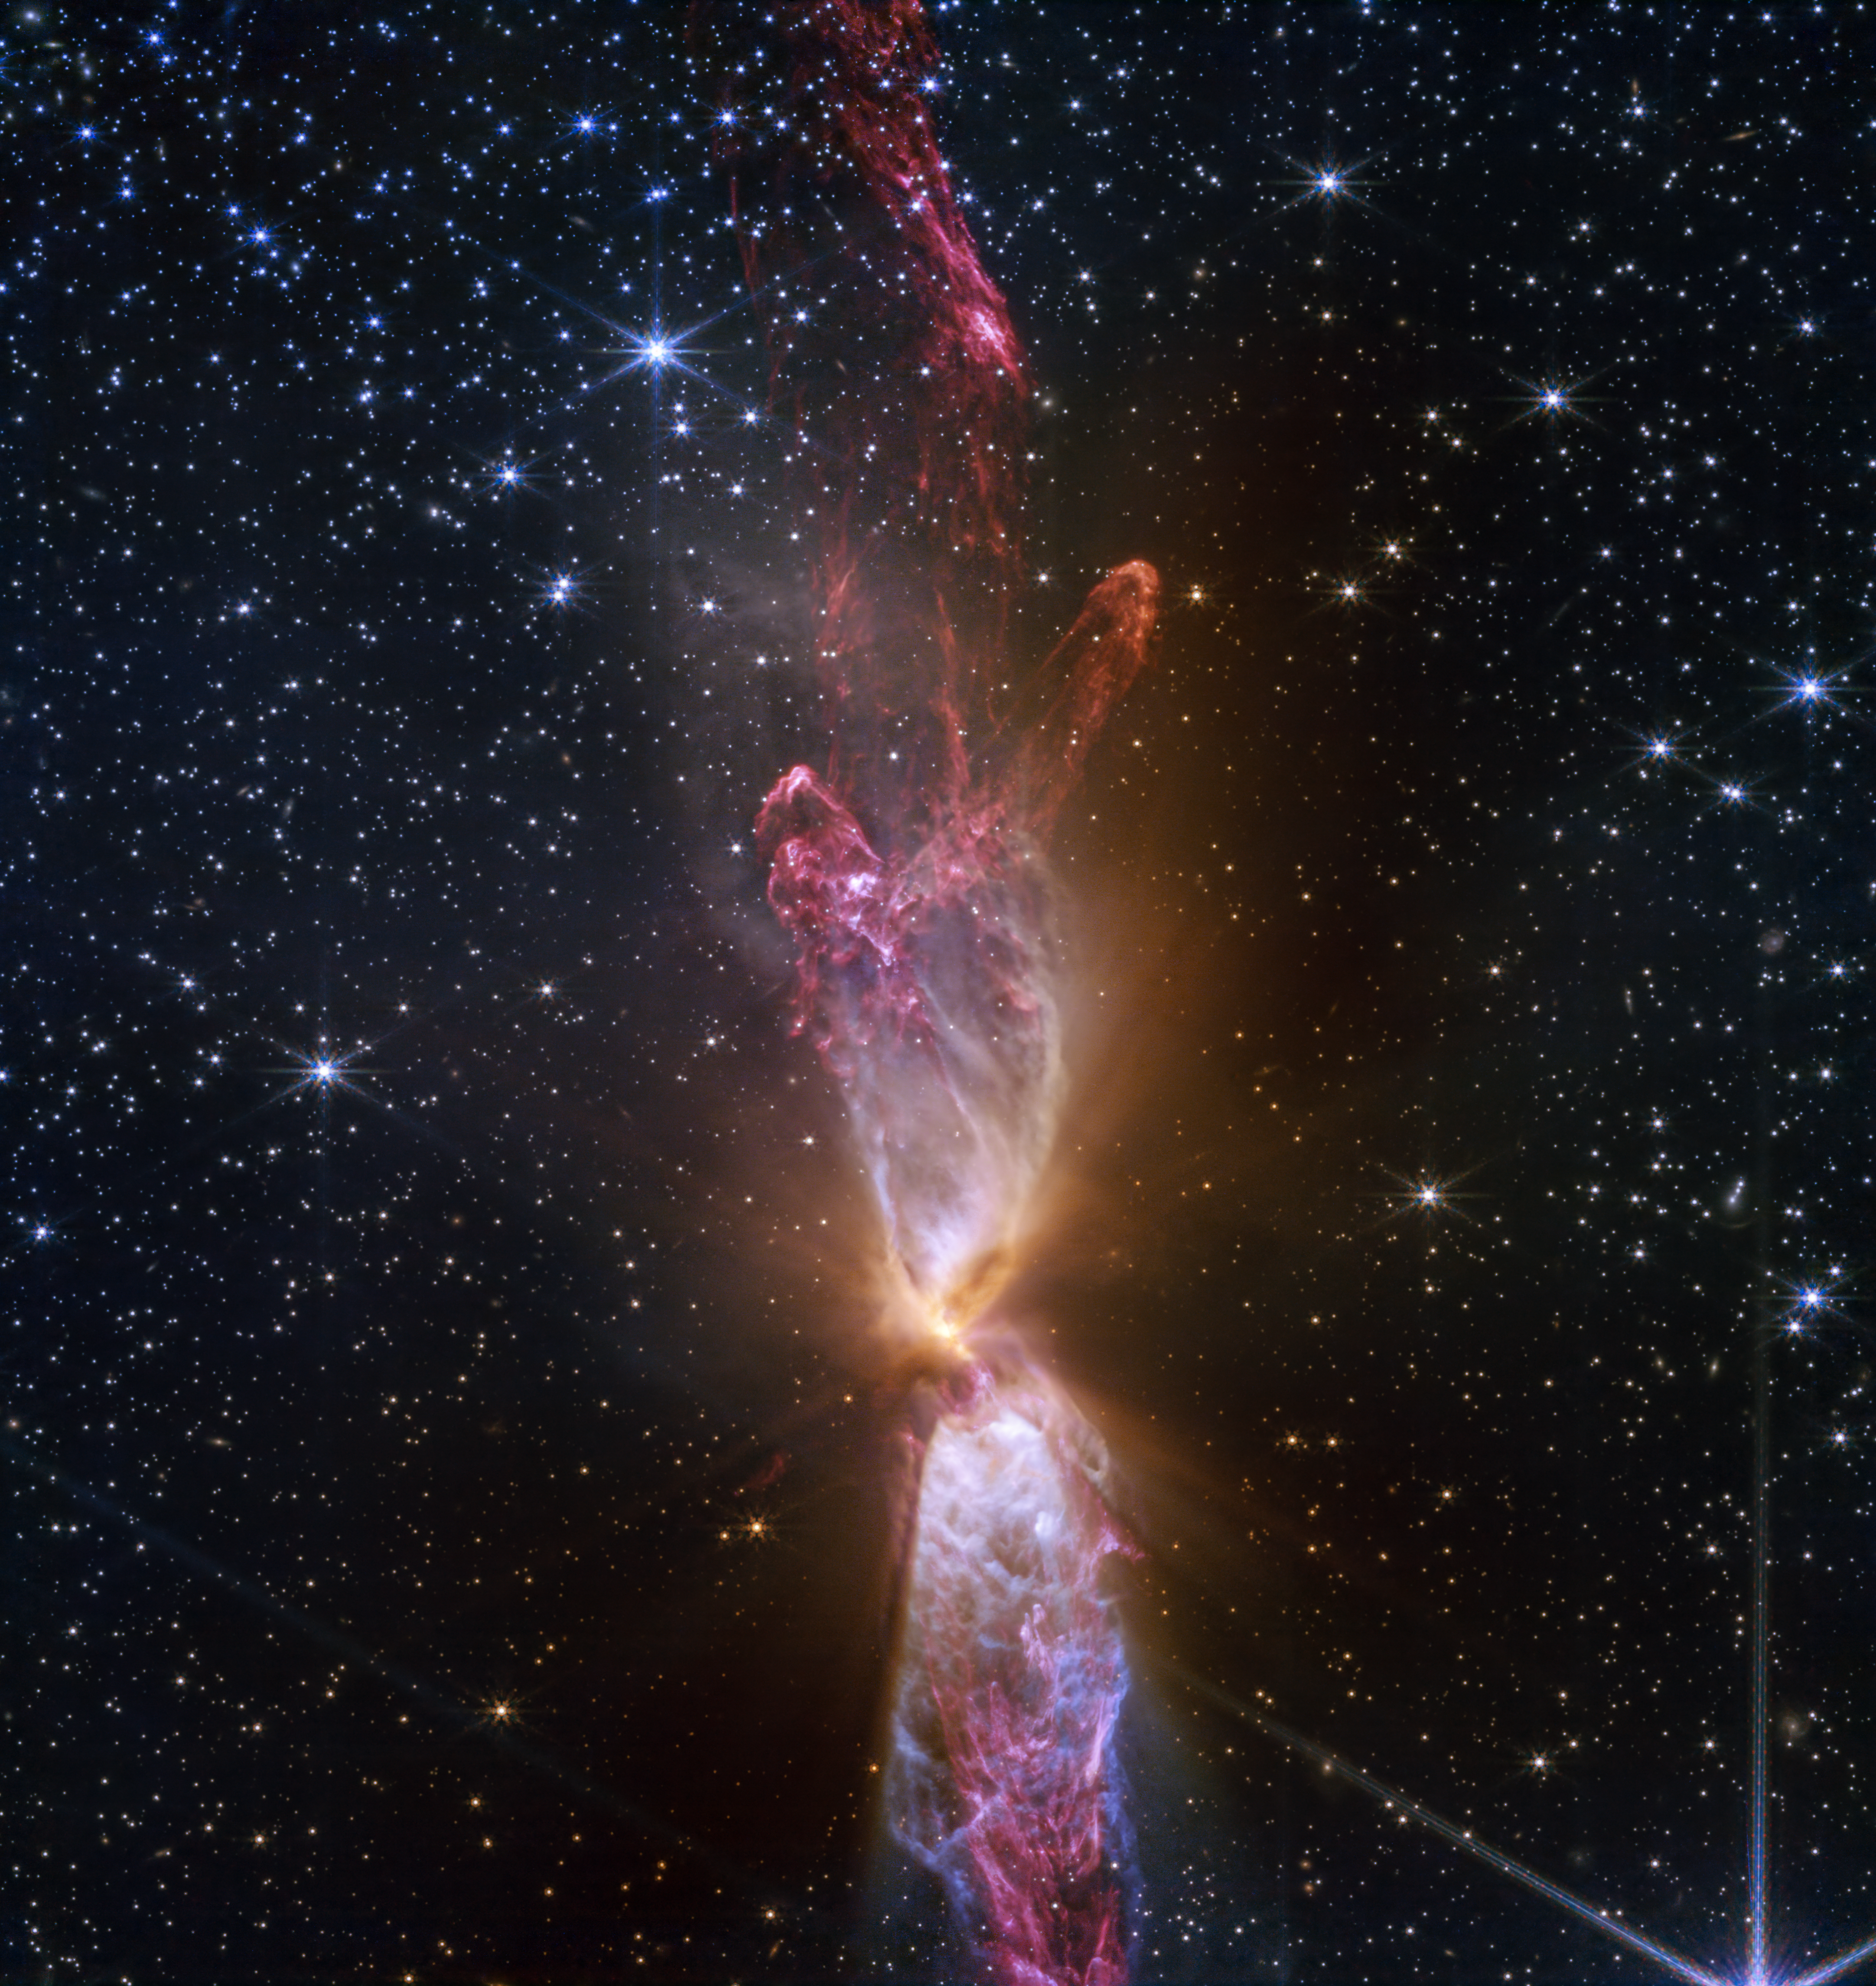

Actively forming star system Lynds 483 (NIRCam image)

Shimmering ejections emitted by two actively forming stars make up Lynds 483 (L483). High-resolution near-infrared light captured by the NASA/ESA/CSA James Webb Space Telescope shows incredible new detail and structure within these lobes, including asymmetrical lines that appear to run into one another. L483 is 650 light-years away in the constellation Serpens.

Credit: NASA, ESA, CSA, STScI